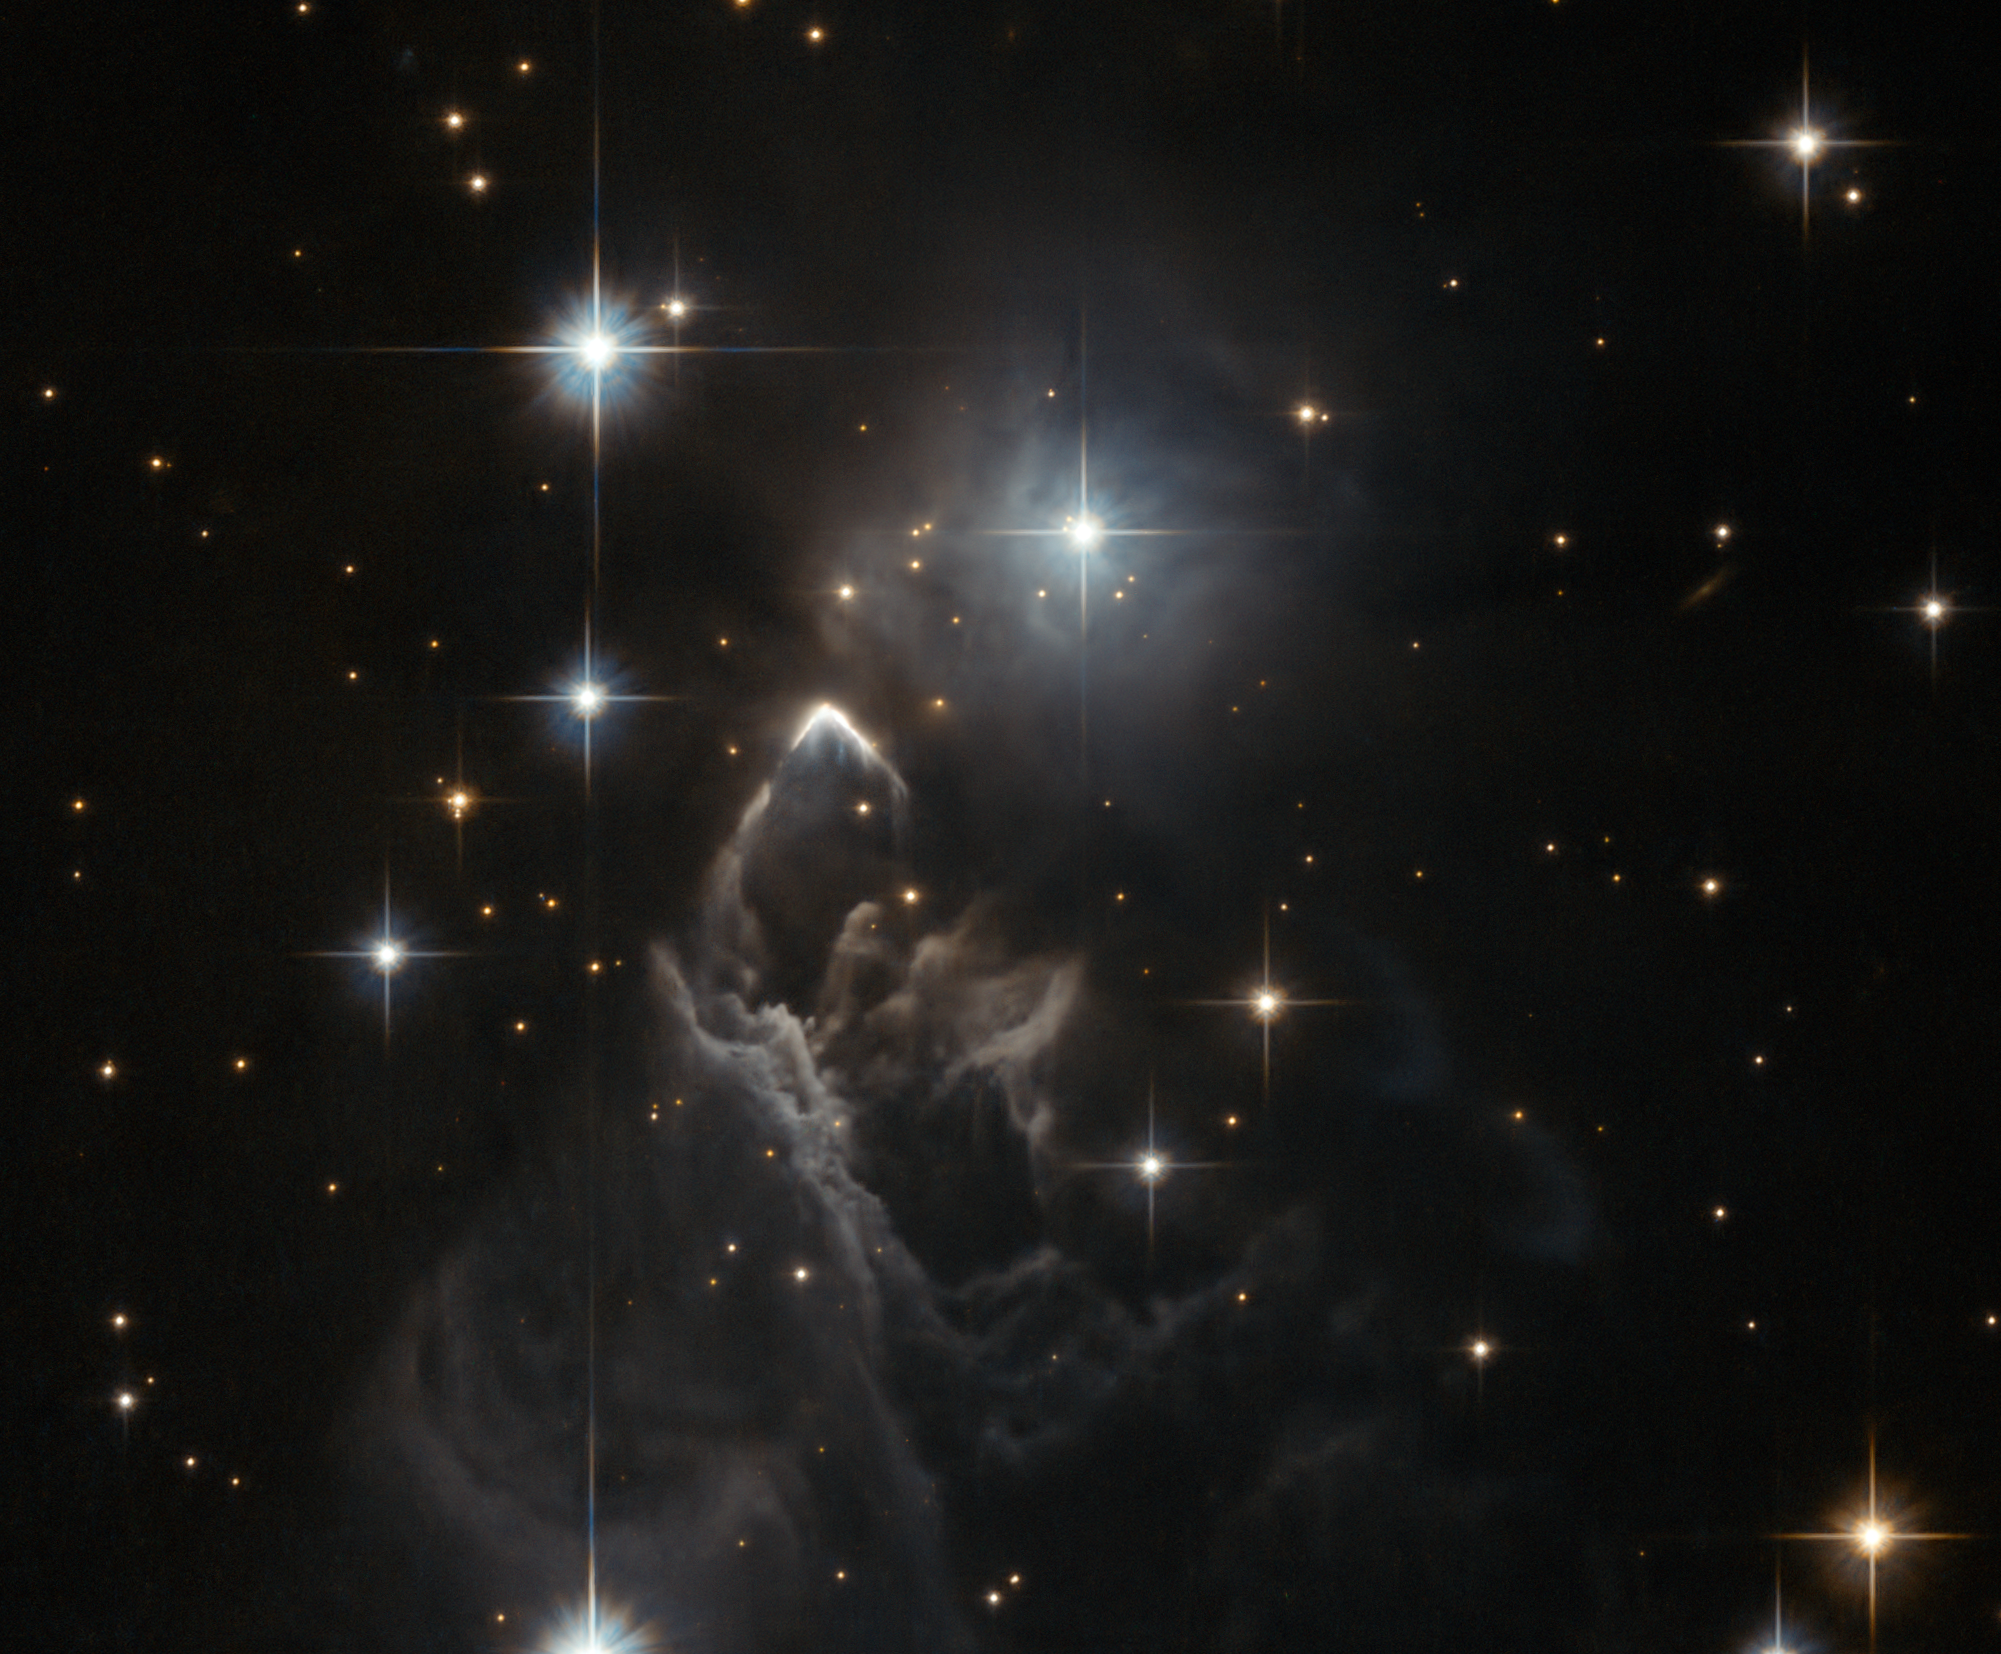

A lucky observation of an enigmatic cloud

The little-known nebula IRAS 05437+2502 billows out among the bright stars and dark dust clouds that surround it in this striking image from the Hubble Space Telescope. It is located in the constellation of Taurus (the Bull), close to the central plane of our Milky Way galaxy. Unlike many of Hubble’s targets, this object has not been studied in detail and its exact nature is unclear. At first glance it appears to be a small, rather isolated, region of star formation and one might assume that the effects of fierce ultraviolet radiation from bright young stars probably were the cause of the eye-catching shapes of the gas. However, the bright boomerang-shaped feature may tell a more dramatic tale. The interaction of a high velocity young star and the cloud of gas and dust may have created this unusually sharp-edged bright arc. Such a reckless star would have been ejected from the distant young cluster where it was born and would travel at 200 000 km/hour or more through the nebula.

This faint cloud was originally discovered in 1983 by the Infrared Astronomical Satellite (IRAS), the first space telescope to survey the whole sky in the infrared. IRAS was run by the United States, the Netherlands, and the United Kingdom and found huge numbers of new objects that were invisible from the ground.

This image was taken with the Wide Field Channel of the Advanced Camera for Surveys on Hubble. It was part of a “snapshot” survey. These are lists of observations that are fitted into Hubble’s busy schedule when possible, without any guarantee that the observation will take place — so it was fortunate that the observation was made at all! This picture was created from images taken through yellow (F606W) and near-infrared (F814W) filters. The exposure times were about eleven minutes per filter and the field of view is about 100 arcseconds across.

Credit: ESA/Hubble, R. Sahai and NASA